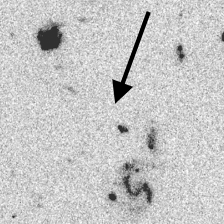

Distant Galaxy in the Hubble Deep Field

Series of four panels that illustrate the distant-galaxy identification technique.

The F606W filter has been used to obtain this image.

Credit: Ken Lanzetta and Amos Yahil (State University of New York at Stony Brook), and NASA/ESA